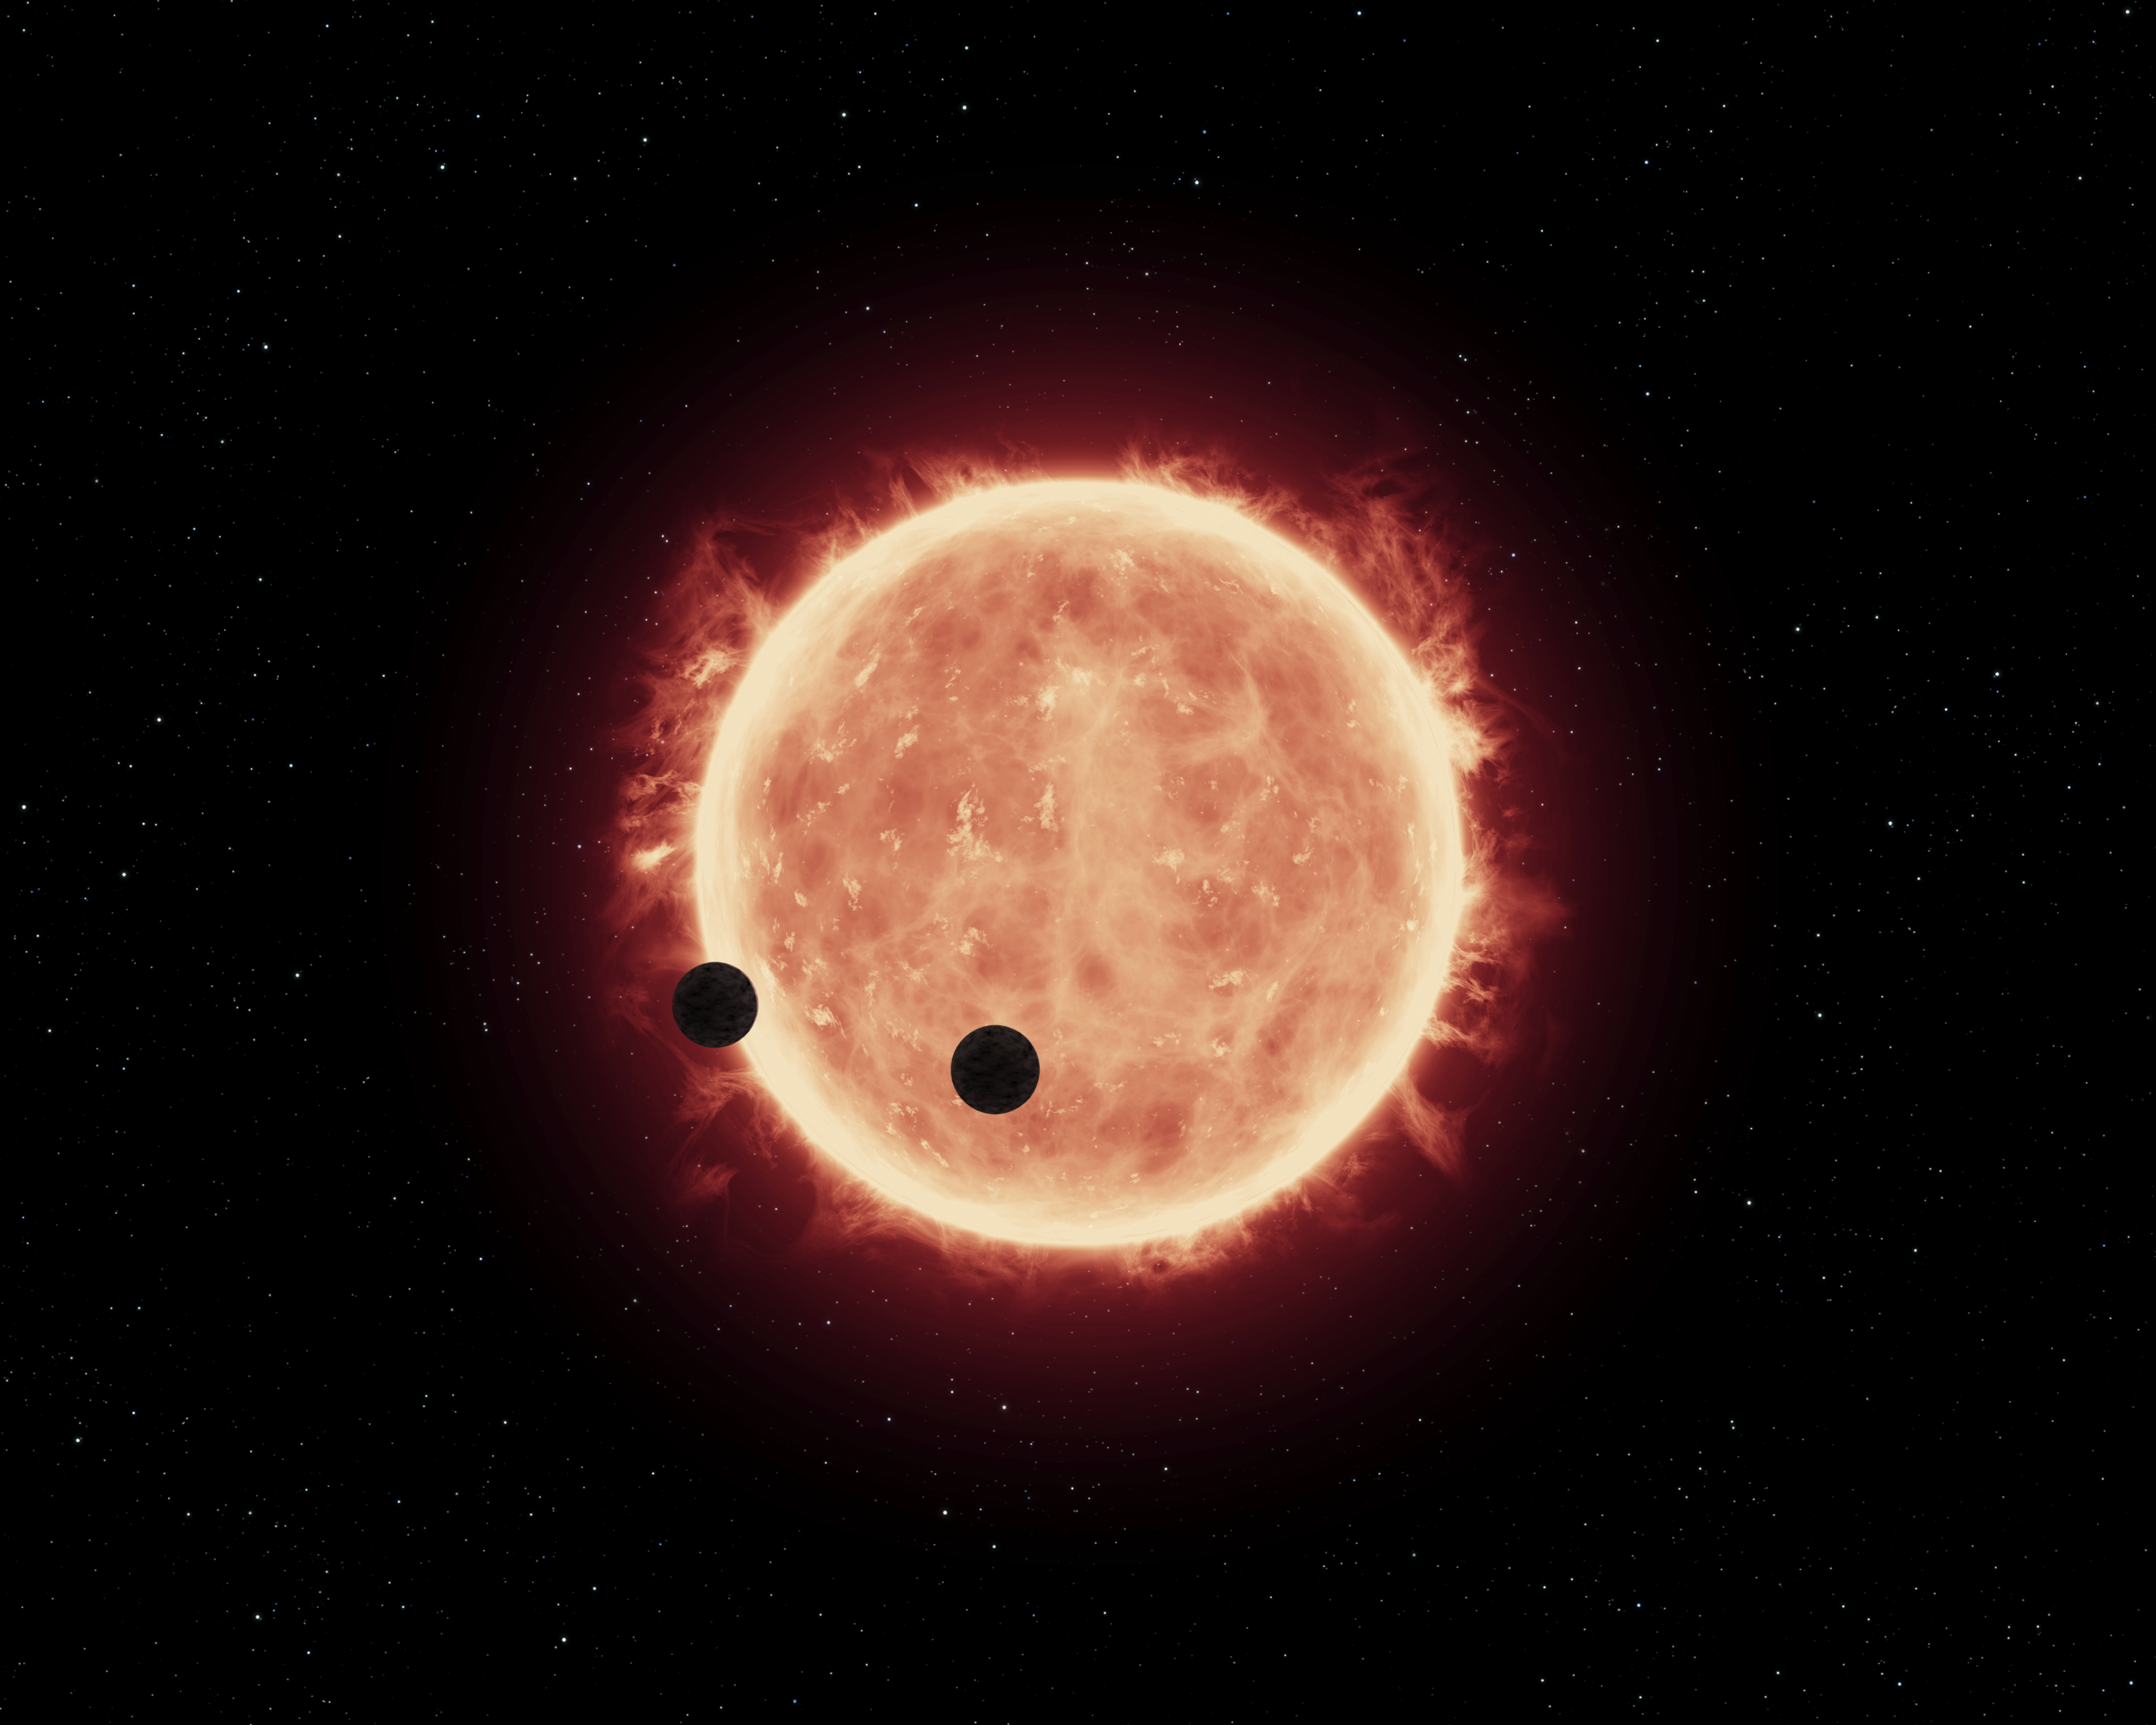

Artist's view of planets transiting red dwarf star in TRAPPIST-1 system

This artist's impression shows two Earth-sized worlds passing in front of their parent red dwarf star, which is much smaller and cooler than our Sun. The star and its orbiting planets TRAPPIST-1b and TRAPPIST-1c reside 40 light-years away. The planets are between 20 and 100 times closer to their star than Earth is to the Sun. Researchers think that at least one of the planets, and possibly both, may be within the star's habitable zone, where moderate temperatures could allow for liquid water on the surface. Hubble looked for evidence of extended atmospheres around both planets and didn't find anything.

Credit: NASA, ESA, and G. Bacon (STScI)